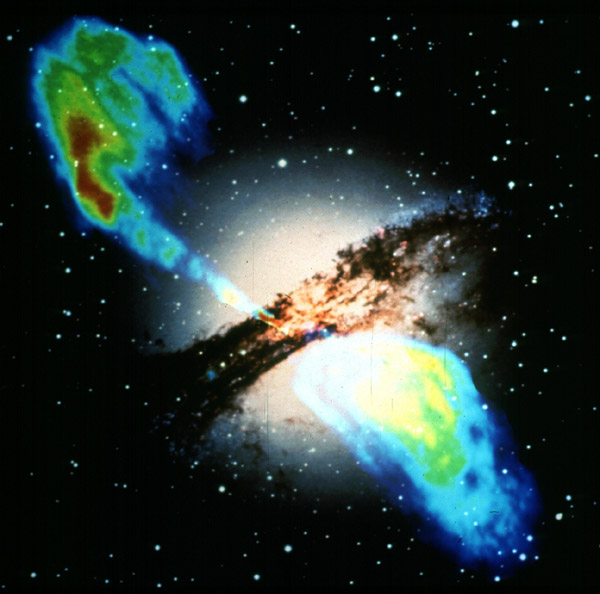

VLA and optical

The elliptical galaxy Centaurus A, also known as NGC 5128, is well known for its dramatic dusty lanes of dark material and its central supermassive black hole, which ejects material with a relativistic speed from the nucelus of the galaxy.

This image shows, that these jets are not only visible in the optical, but also emmit in radio wavelengths. By taking radio observations of the jets separated by a decade, astronomers have determined that the inner parts of the jets are moving at about one half of the speed of light.

Credit: NASA & ESA